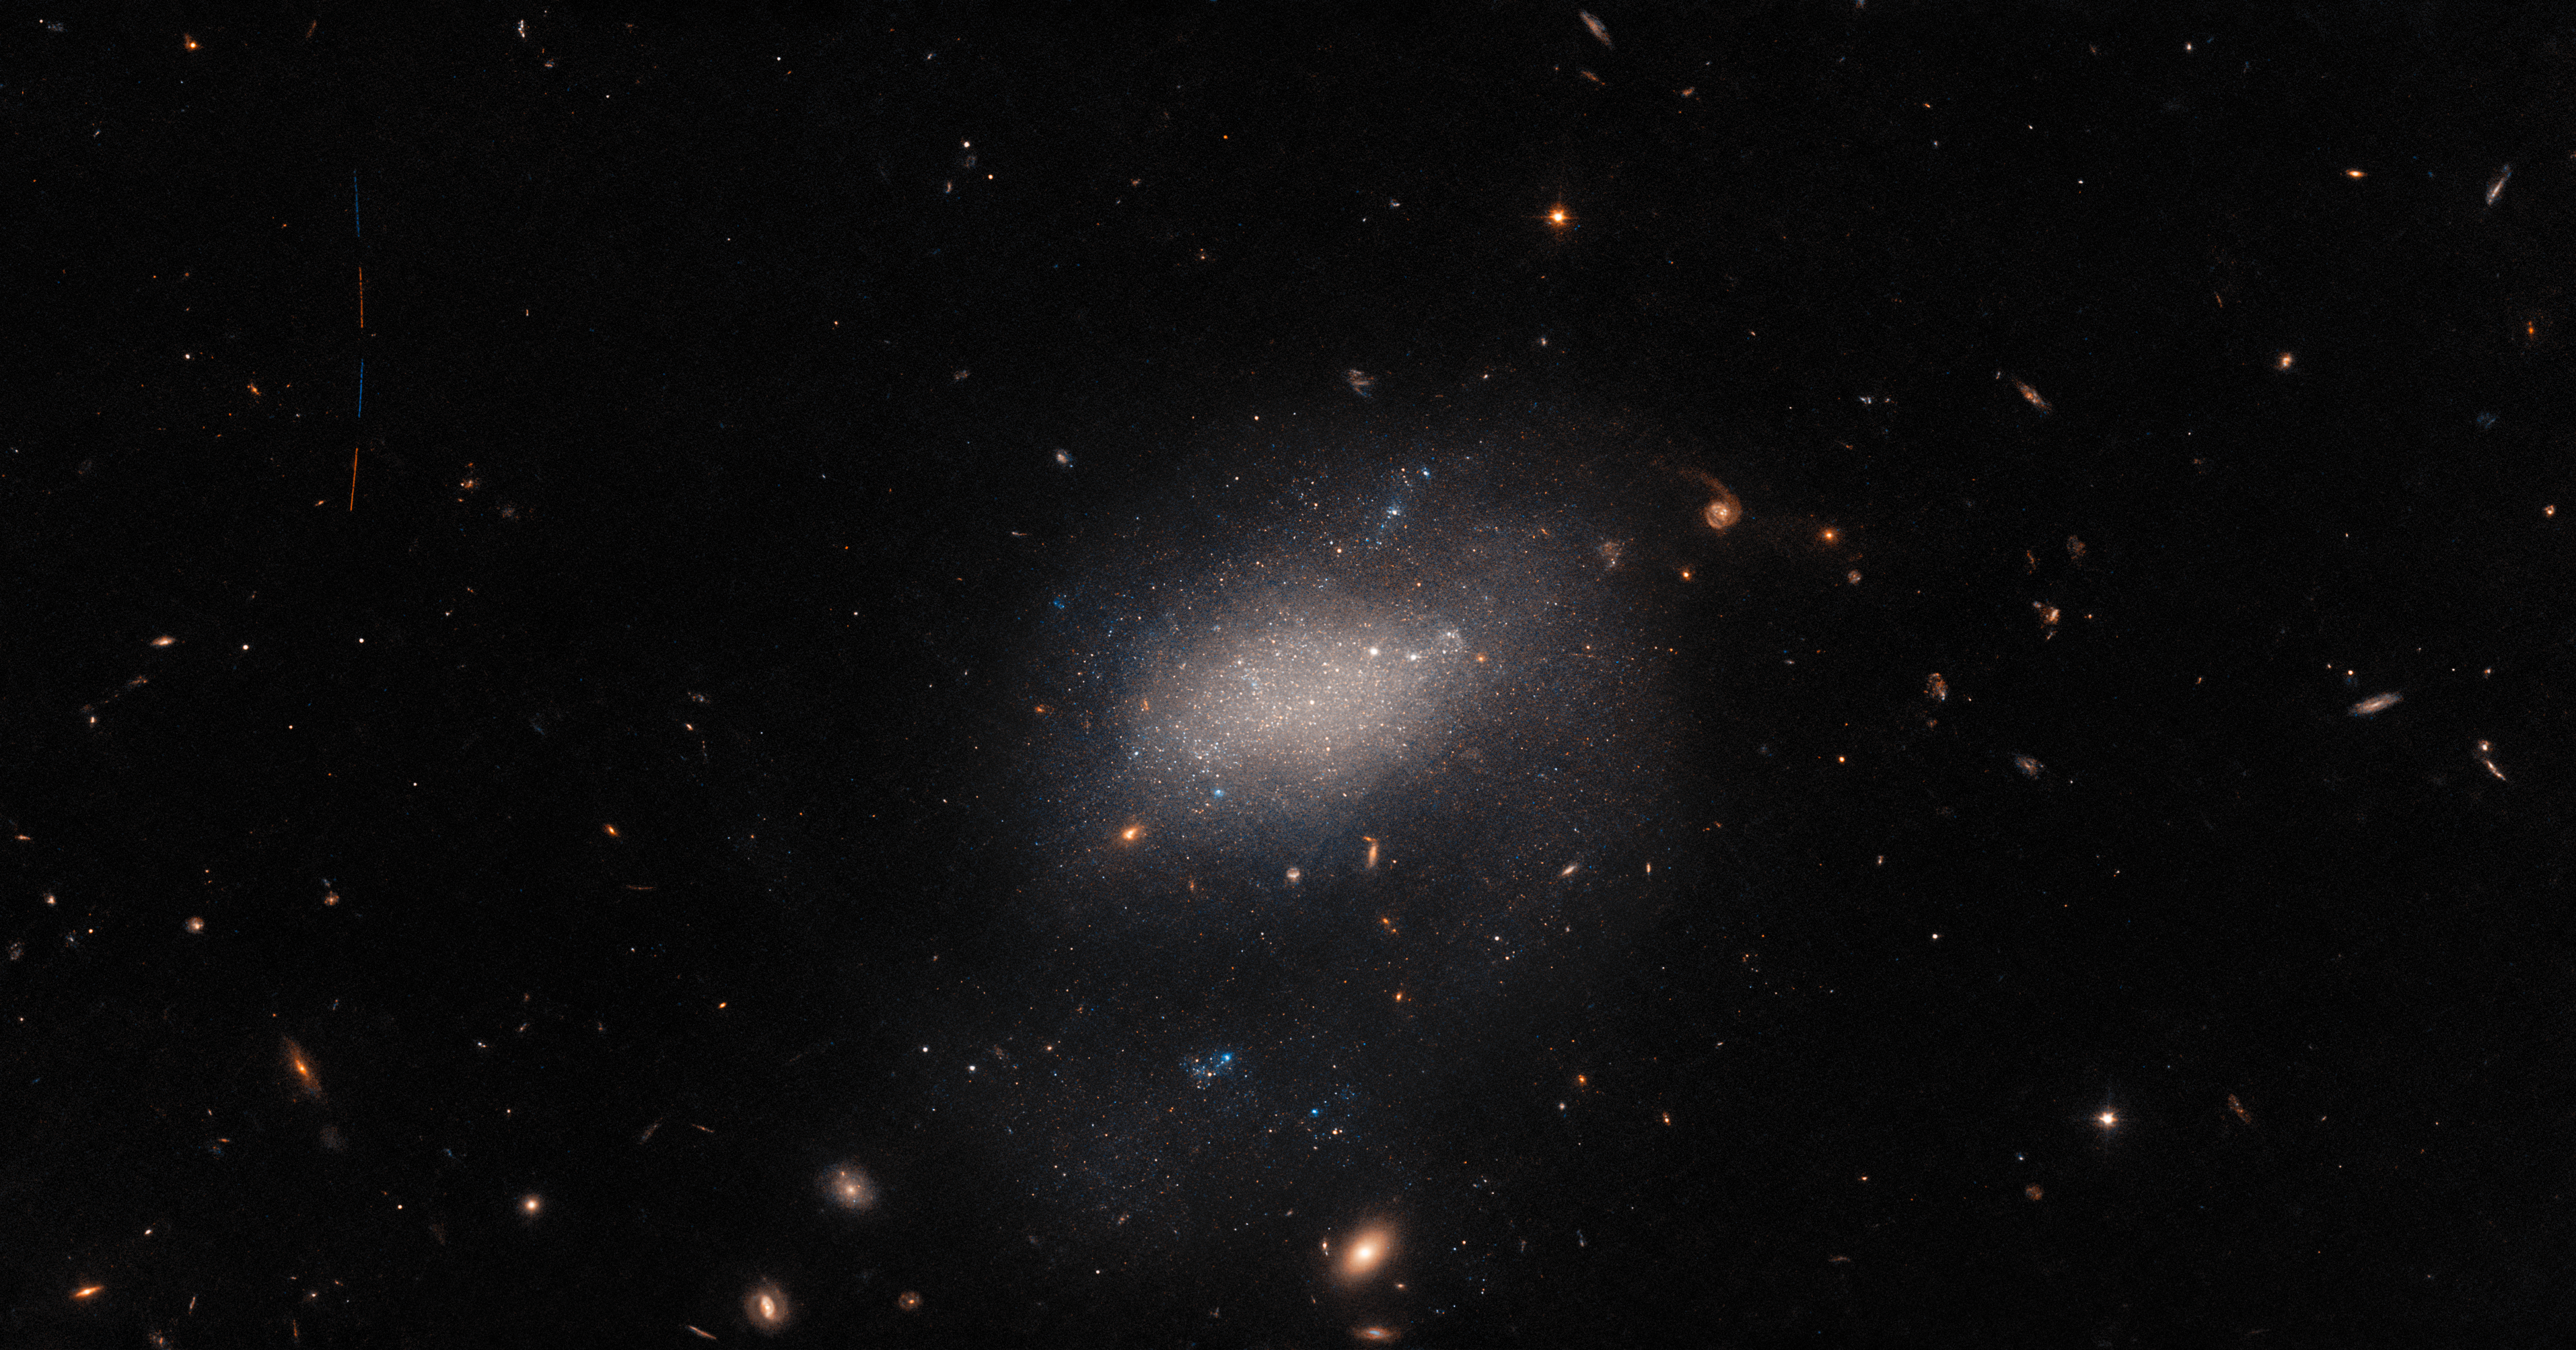

Visitor to a Galaxy

A host of astronomical objects throng this image from the NASA/ESA Hubble Space Telescope. Background galaxies ranging from stately spirals to fuzzy ellipticals are strewn across the image, and bright foreground stars much closer to home are also present, surrounded by diffraction spikes. In the centre of the image, the vague shape of the small galaxy UGC 7983 appears as a hazy cloud of light. UGC 7983 is around 30 million light-years from Earth in the constellation Virgo, and is a dwarf irregular galaxy — a type thought to be similar to the very earliest galaxies in the Universe.

This image also conceals an astronomical interloper. A minor asteroid, only a handful of kilometres across, can be seen streaking across the upper left-hand side of this image. The trail of the asteroid is visible as four streaks of light separated by small gaps. These streaks of light represent the four separate exposures that were combined to create this image, the small gaps between each observation being necessary to change the filters inside Hubble’s Advanced Camera for Surveys.

Capturing an asteroid was a fortunate side effect of a larger effort to observe every known galaxy close to the Milky Way. When this project was first proposed, roughly 75% of all the Milky Way’s near galactic neighbours had been imaged by Hubble. A group of astronomers proposed using the gaps between longer Hubble observations to capture images of the remaining 25%. The project was an elegantly efficient way to fill out some gaps not only in Hubble's observing schedule, but also in our knowledge of nearby galaxies.

Credit: ESA/Hubble & NASA, R. Tully